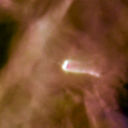

109-327

One of 42 new proplyds discovered in the Orion Nebula, 109-327 is one of the bright proplyds that lies relatively close to the nebula’s brightest star, Theta 1 Orionis C. This tadpole-shaped tail is actually a jet of matter flowing away from the excited cusp.

Credit: NASA/ESA and L. Ricci (ESO)